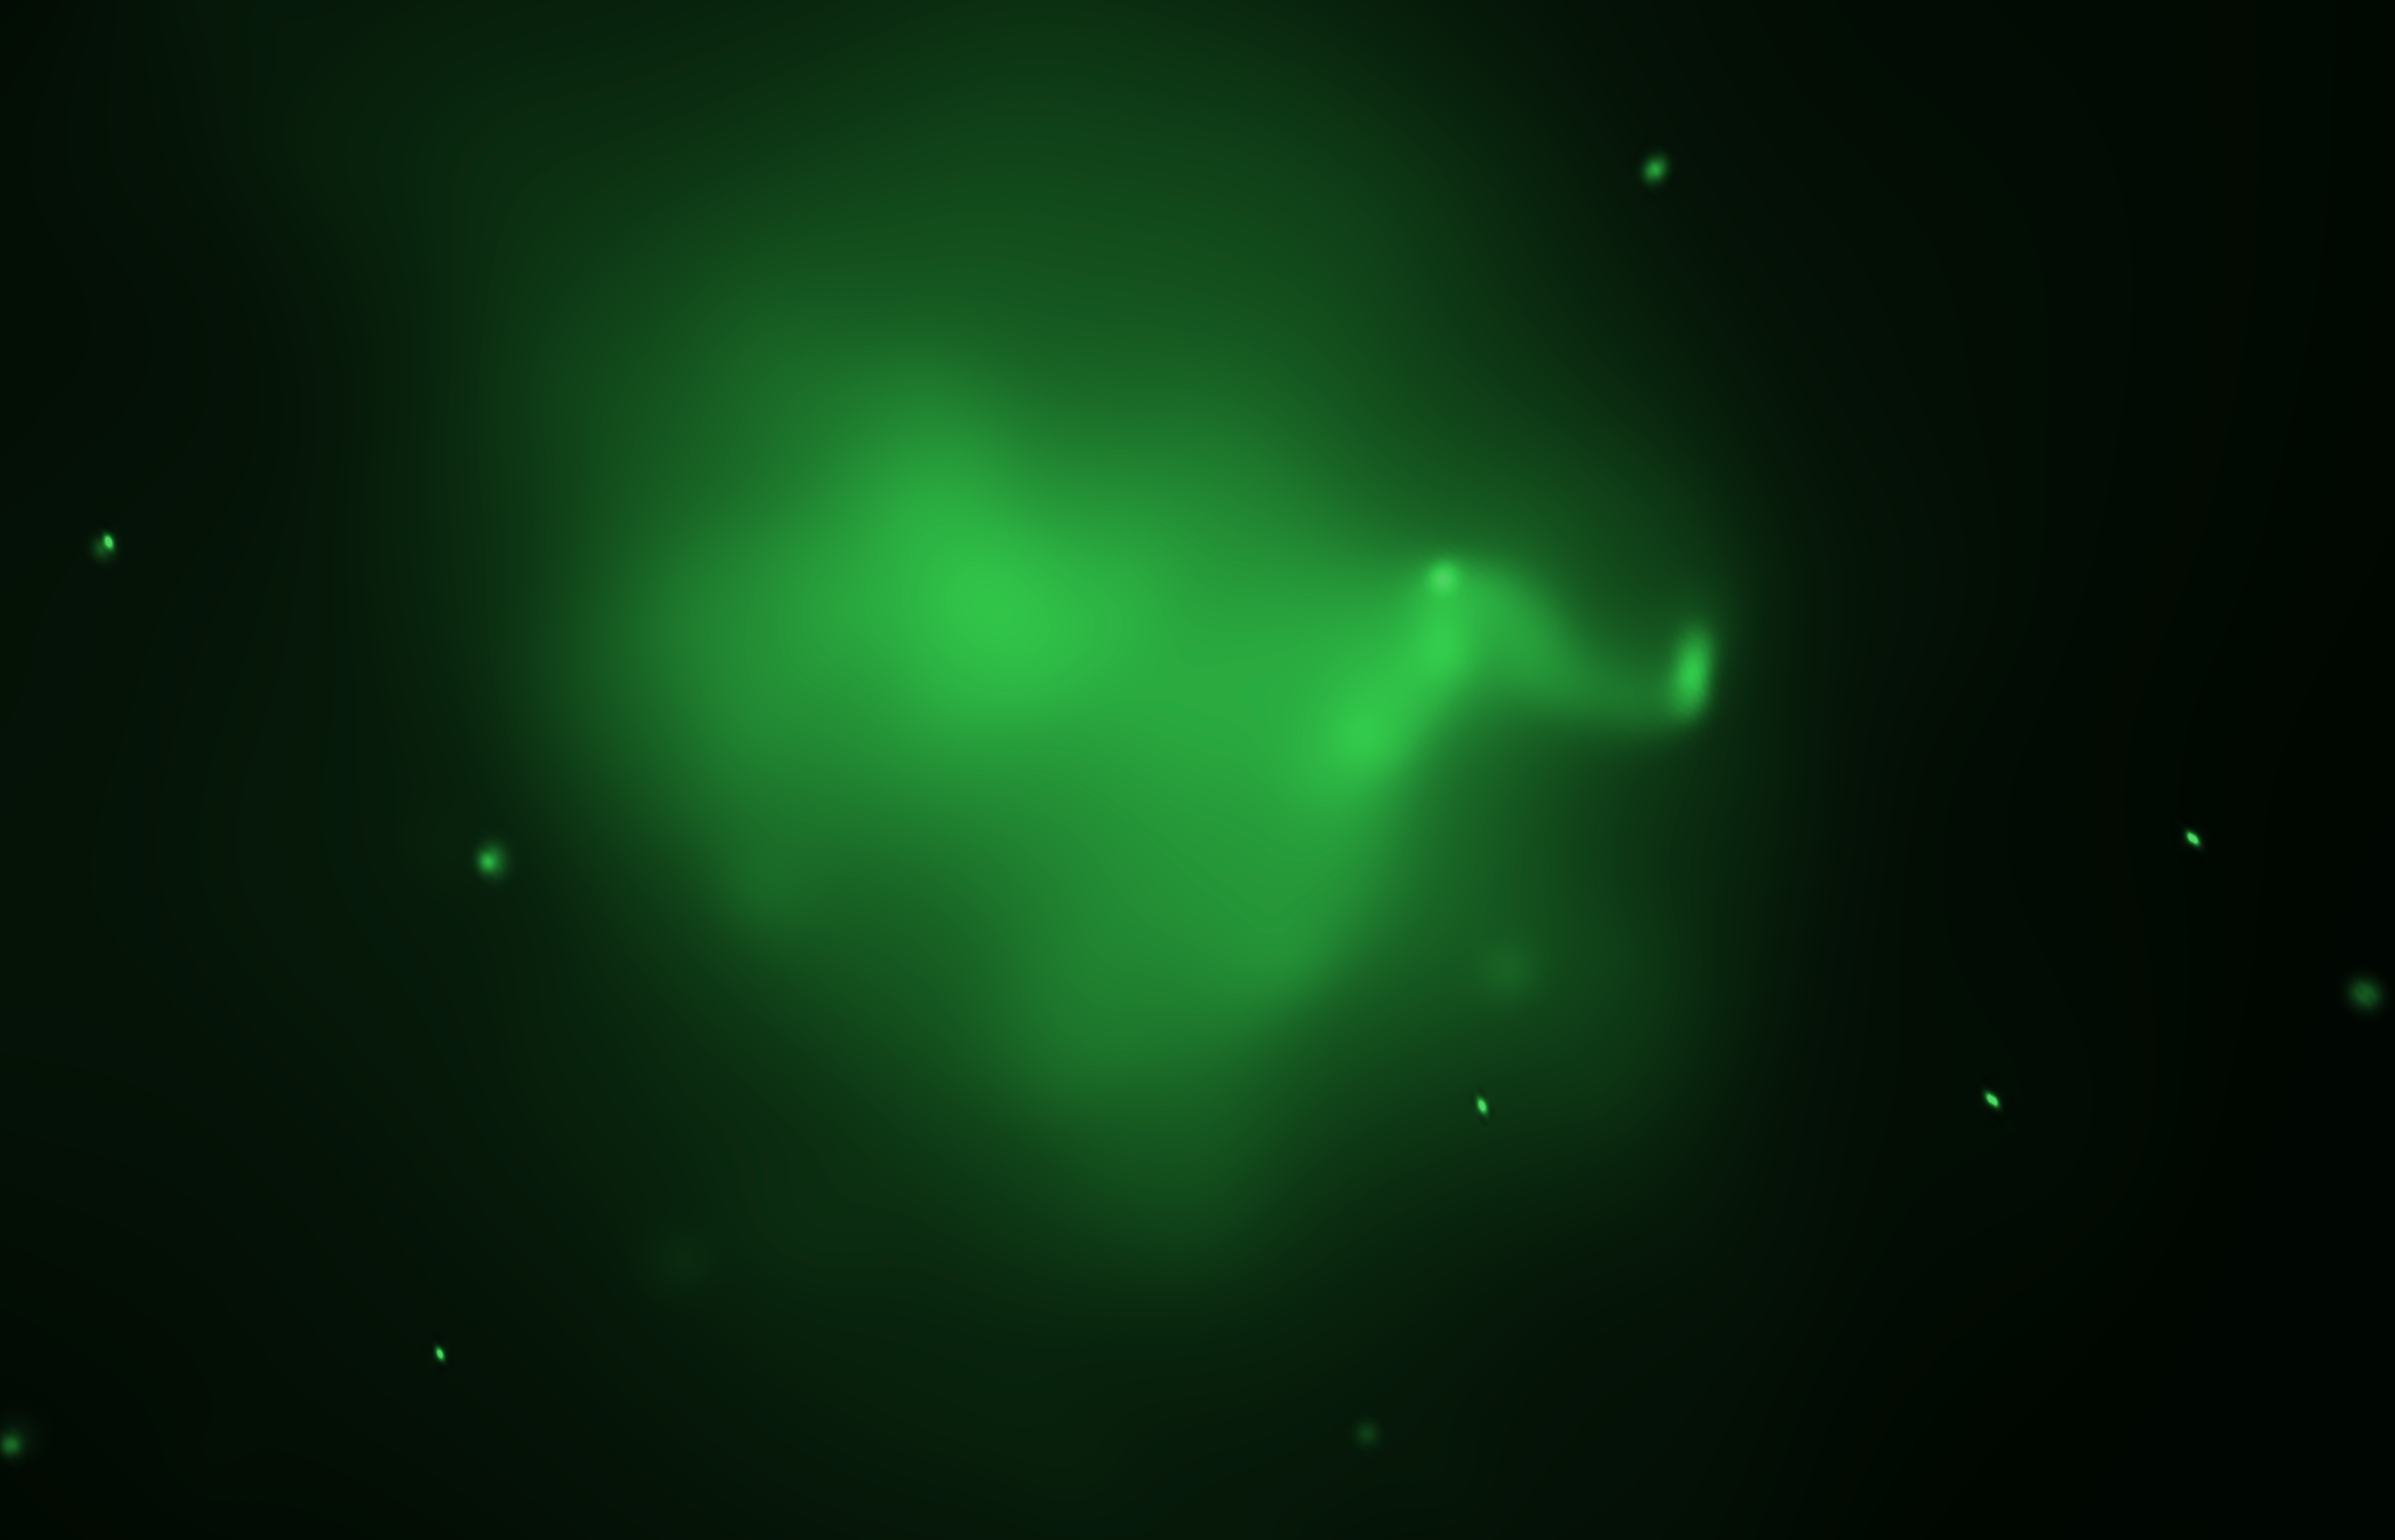

Galaxy cluster Abell 520's hot gas (Chandra)

This image shows regions of hot gas at the core of merging galaxy cluster Abell 520, detected by NASA's Chandra X-ray Observatory. The gas is evidence that a collision between massive galaxy clusters took place.

Credit: NASA, ESA, CXO, and M.J. Jee (University of California, Davis)